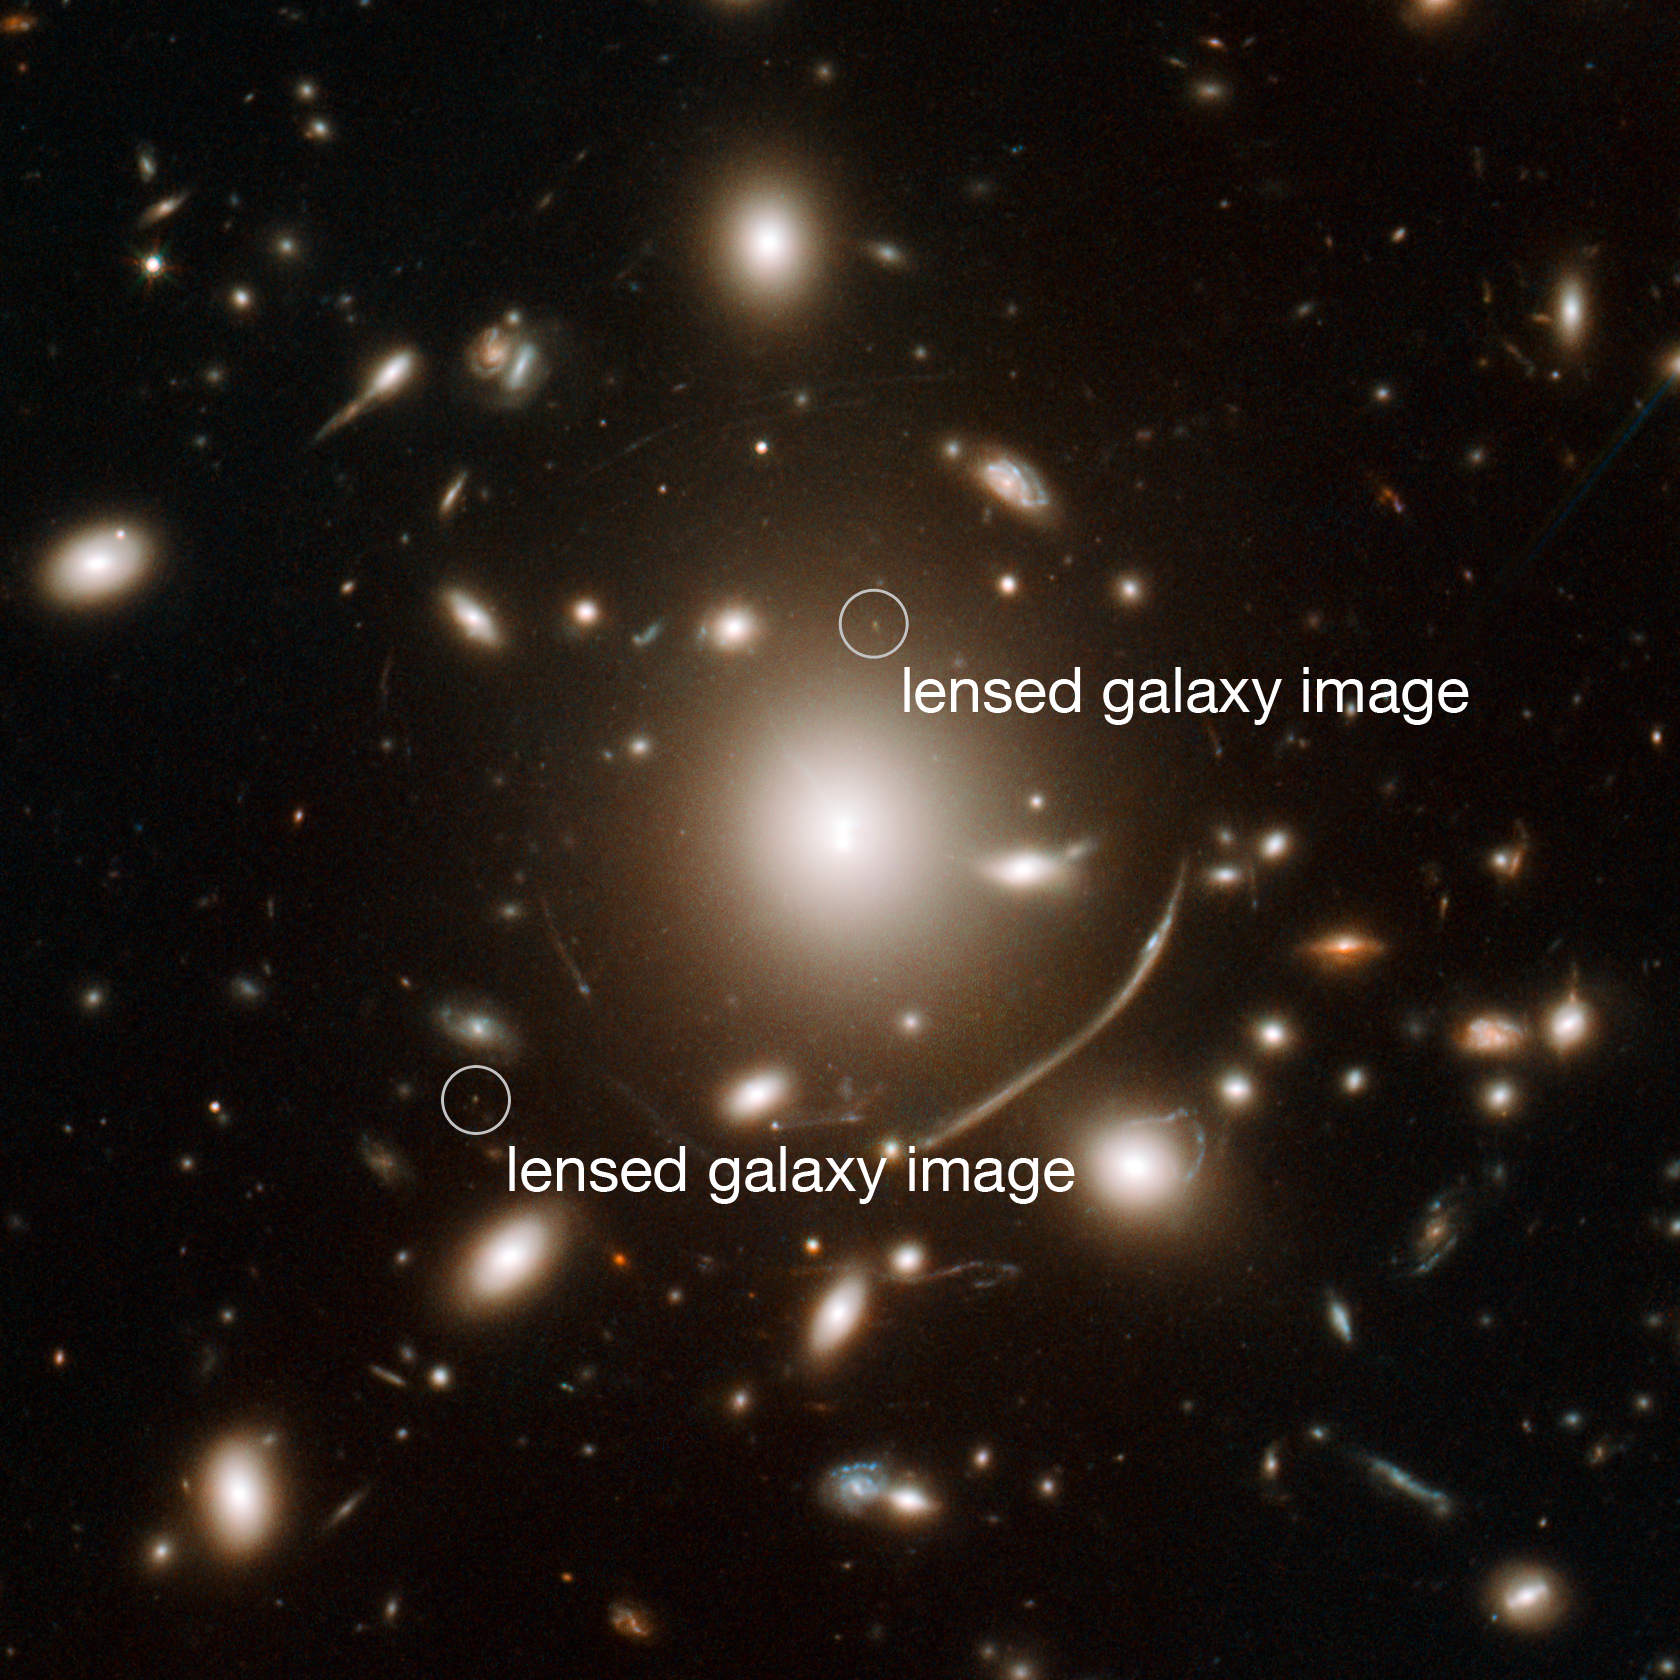

Annotated view of Abell 383

The giant cluster of elliptical galaxies in the centre of this image contains so much dark matter mass that its gravitational field bends light. This means that for very distant galaxies in the background, the cluster acts as a sort of magnifying glass, bending and concentrating the distant object’s light towards Hubble. These gravitational lenses are one tool astronomers can use to extend Hubble’s vision beyond what it would normally be capable of seeing.

Using Abell 383, a team of astronomers have identified and studied a galaxy so far away we see it as it was less than a billion years after the Big Bang. It is visible as two tiny dots (labelled) on either side of the bright cluster galaxy in the centre. Distant objects seen through gravitational lenses are typically multiply imaged and heavily distorted.

Viewing this galaxy through the gravitational lens meant that the scientists were able to discern many intriguing features that would otherwise have remained hidden, including that its stars were unexpectedly old for a galaxy this close in time to the beginning of the Universe. This has profound implications for our understanding of how and when the first galaxies formed, and how the diffuse fog of neutral hydrogen that filled the early Universe was cleared.

Credit: NASA, ESA, J. Richard (CRAL) and J.-P. Kneib (LAM). Acknowledgement: Marc Postman (STScI)